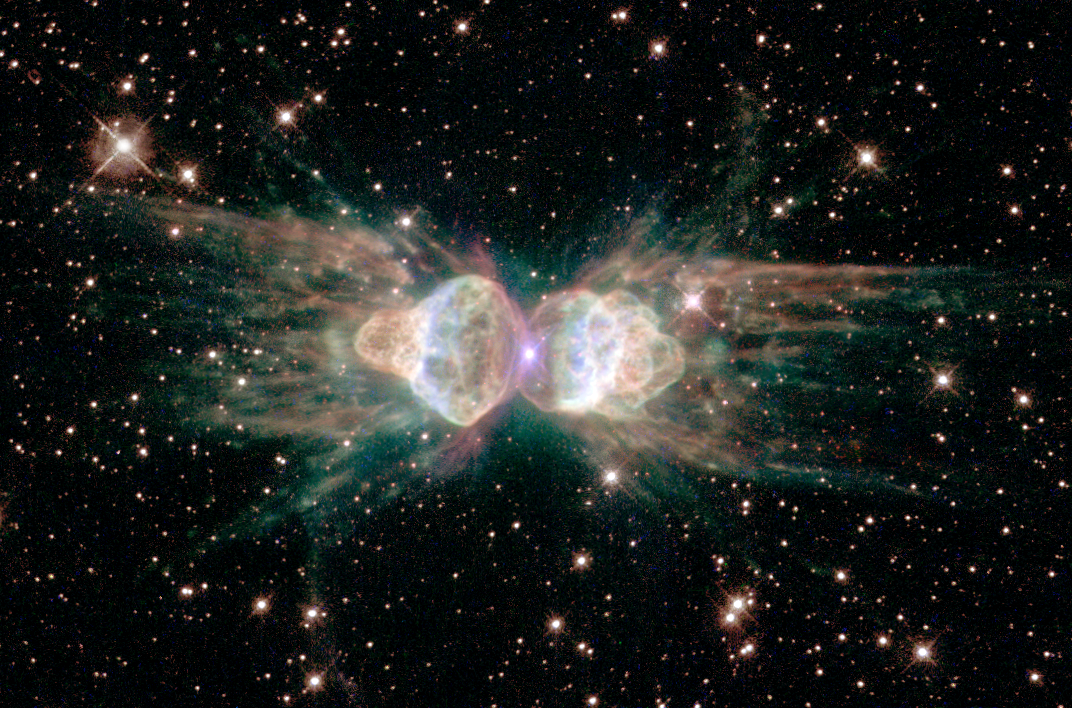

Ants in space?

From ground-based telescopes, the so-called "ant nebula" (Menzel 3, or Mz 3) resembles the head and thorax of a garden-variety ant. This dramatic NASA/ESA Hubble Space Telescope image, showing 10 times more detail, reveals the "ant's" body as a pair of fiery lobes protruding from a dying, Sun-like star.

The Hubble images directly challenge old ideas about the last stages in the lives of stars. By observing Sun-like stars as they approach their deaths, the Hubble Heritage image of Mz 3 - along with pictures of other planetary nebulae - shows that our Sun's fate probably will be more interesting, complex, and striking than astronomers imagined just a few years ago.

Credit: NASA, ESA and the Hubble Heritage Team (STScI/AURA)